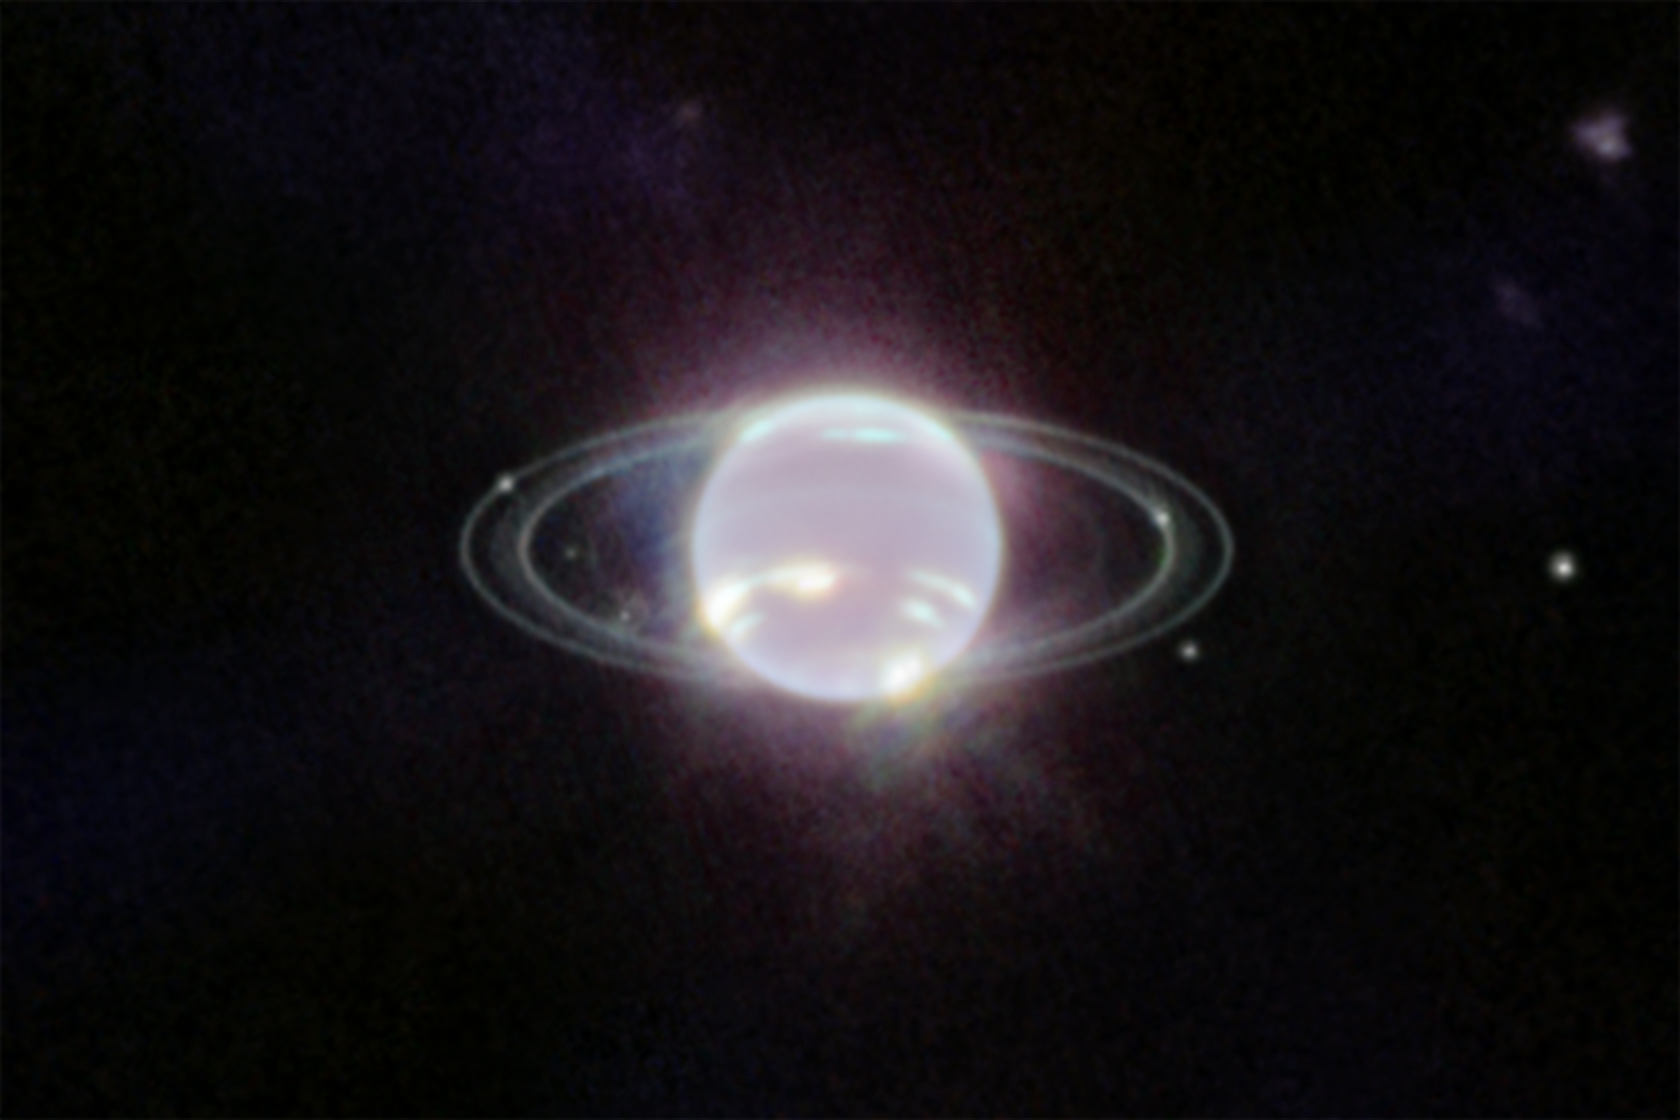

Neptune (NIRCam Image)

Webb’s Near-Infrared Camera (NIRCam) image of Neptune, taken on 12 July 2022, brings the planet’s rings into full focus for the first time in more than three decades. The most prominent features of Neptune’s atmosphere in this image are a series of bright patches in the planet’s southern hemisphere that represent high-altitude methane-ice clouds. More subtly, a thin line of brightness circling the planet’s equator could be a visual signature of global atmospheric circulation that powers Neptune’s winds and storms. Additionally, for the first time, Webb has teased out a continuous band of high-latitude clouds surrounding a previously-known vortex at Neptune’s southern pole.

Credit: NASA, ESA, CSA, and STScI